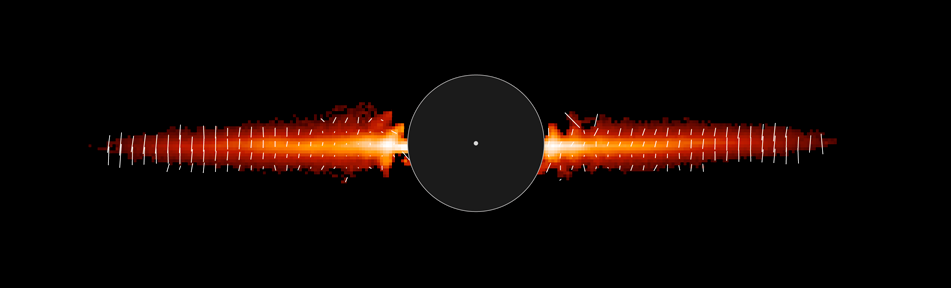

Hubble's snapshot of Debris disk around young star - annotated

This annotated image shows light reflected off dust in a debris disk around the young star AU Microscopii.

Credit: NASA/ESA, J. R. Graham and P. Kalas (University of California, Berkeley), and B. Matthews (Hertzberg Institute of Astrophysics)